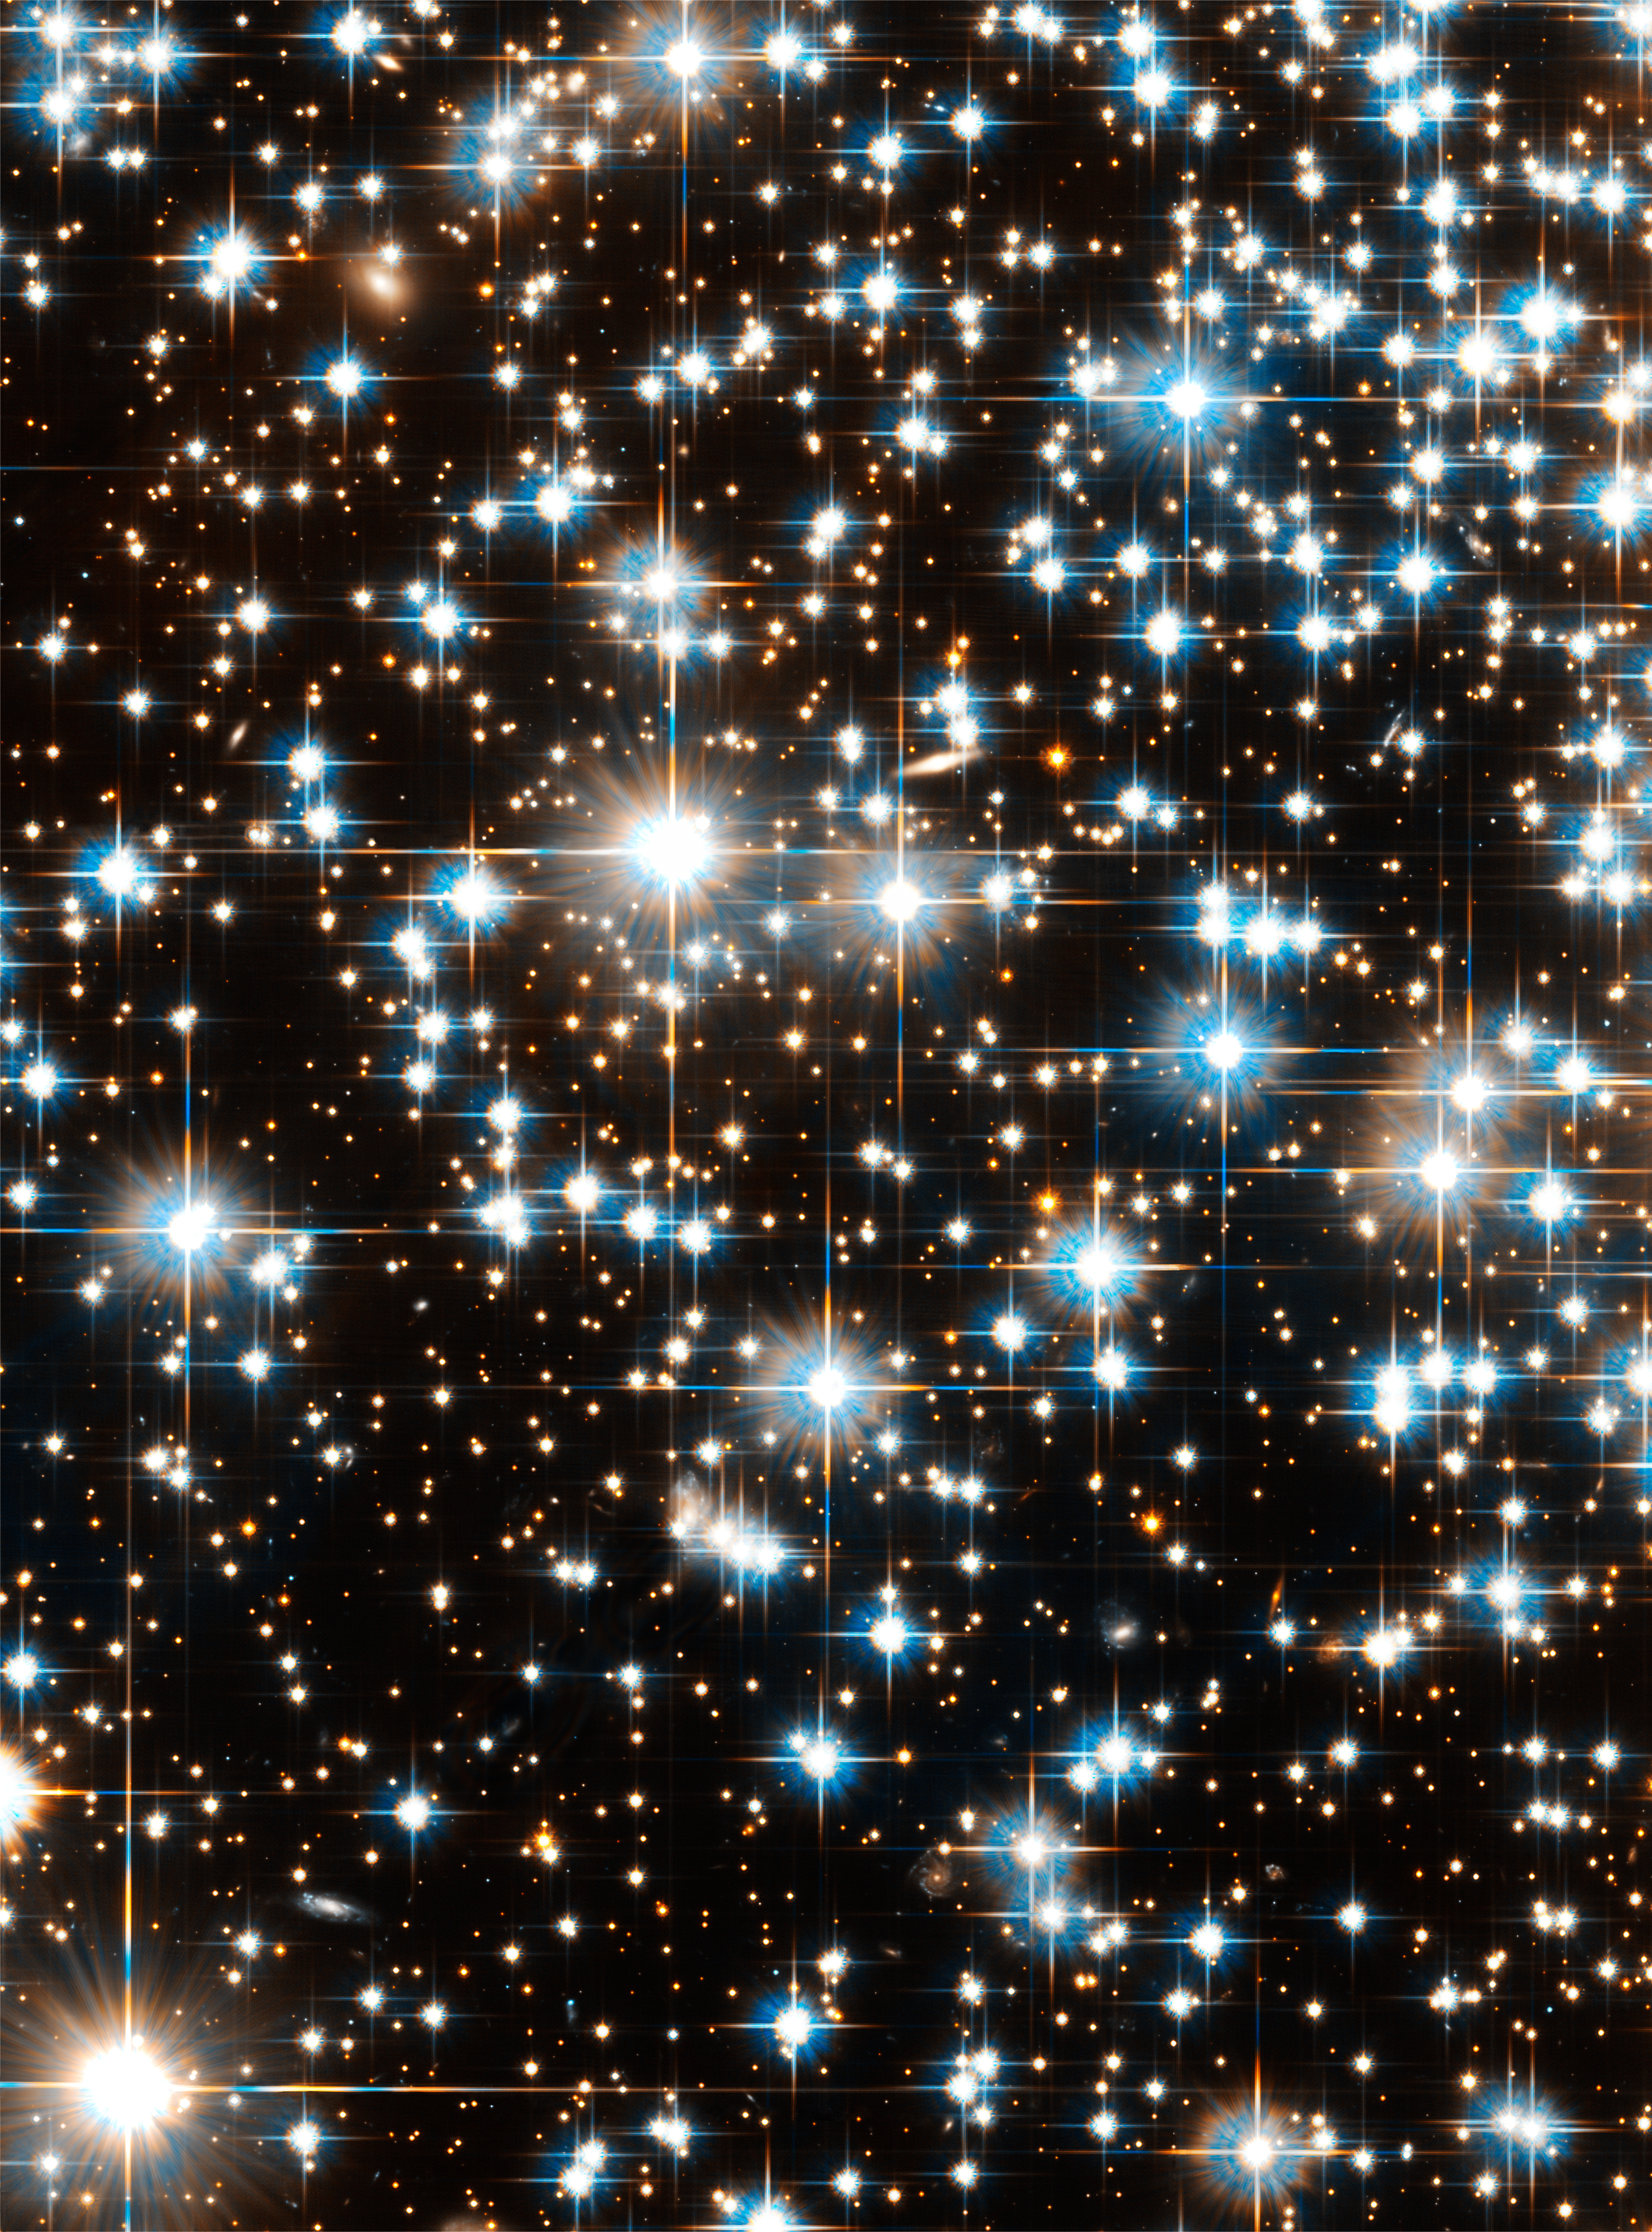

Globular cluster NGC 6397

Image of globular cluster NGC 6397 in the constellation Ara (the Altar). The cluster is home to a highly unusual system consisting of a fast spinning pulsar and a bloated red companion star.

Credit: NASA, ESA and H. Richer (University of British Columbia)